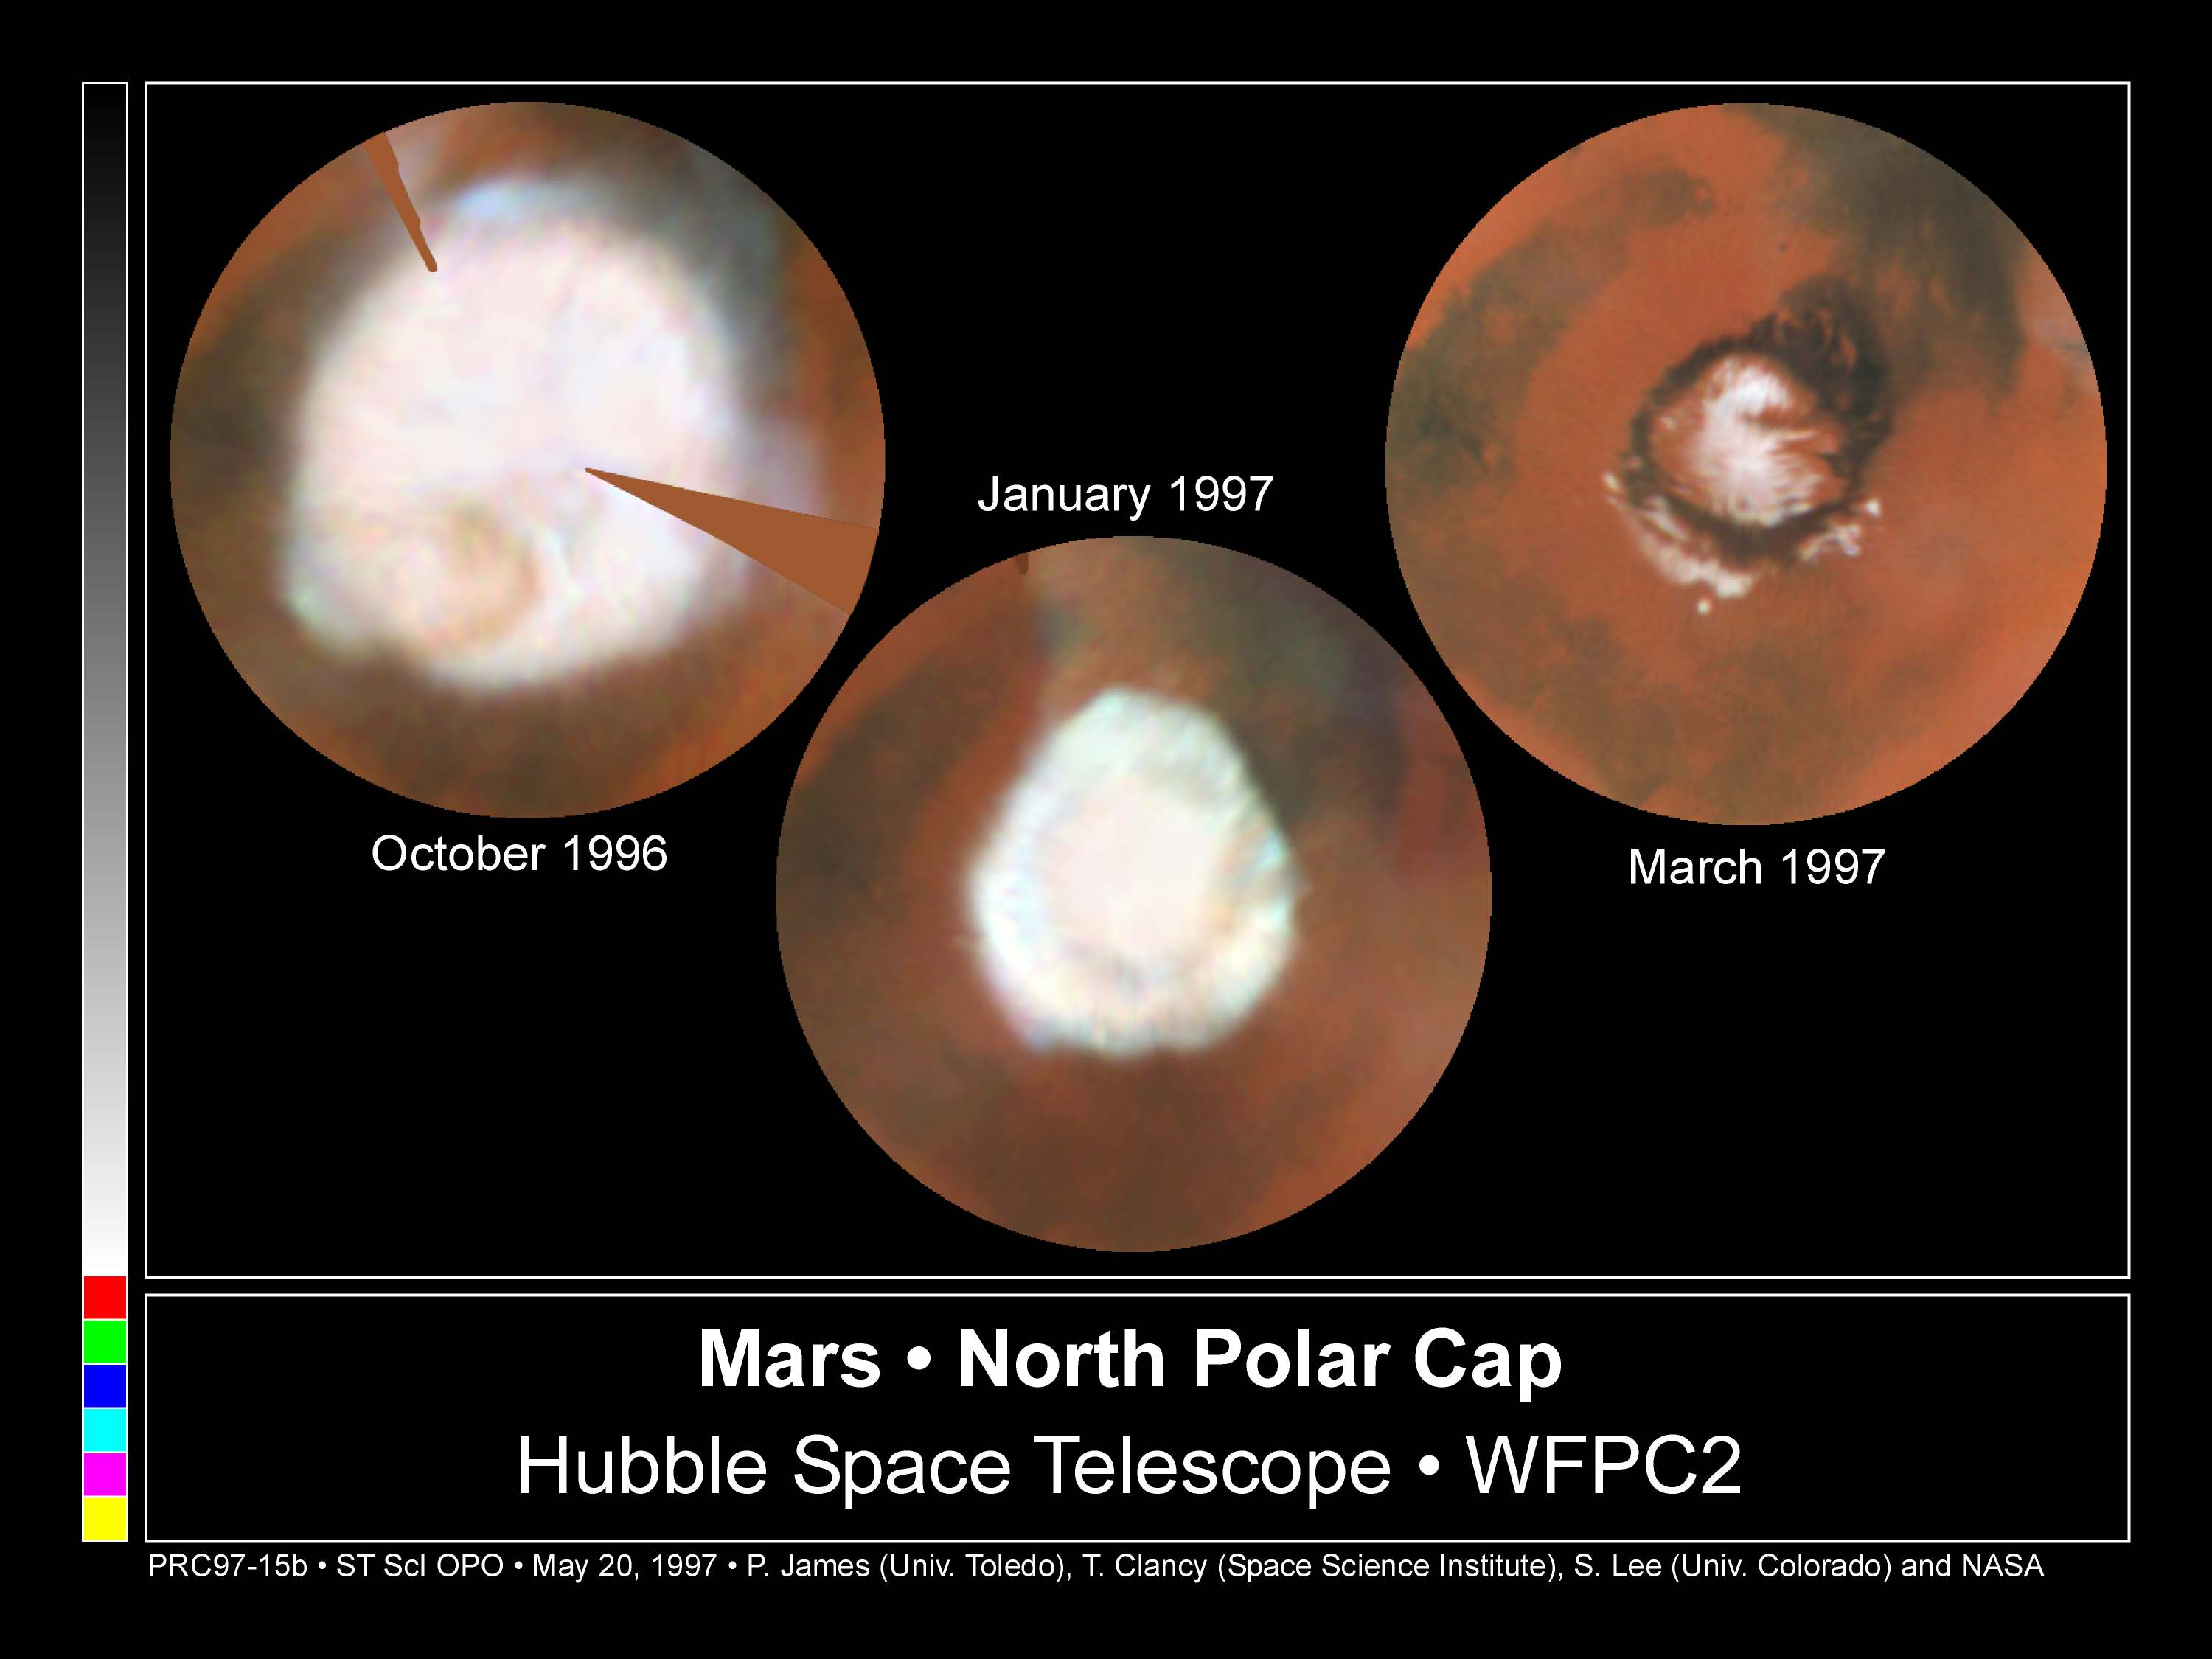

Seasonal Changes In Mars' North Polar Ice Cap

These images, which seem to have been taken while Hubble Space Telescope (HST) was looking directly down on the Martian North Pole, were actually created by assembling mosaics of three sets of images taken by HST in October, 1996 and in January and March, 1997 and projecting them to appear as they would if seen from above the pole. This first mosaic is a view which could not actually be seen in nature because at this season a portion of the pole would have actually been in shadow; the last view, taken near the summer solstice, would correspond to the Midnight Sun on Earth with the pole fully illuminated all day. The resulting polar maps begin at 50 degrees N latitude and are oriented with 0 degrees longitude at the 12 o'clock position. This series of pictures captures the seasonal retreat of Mars' north polar cap.

Credit: Phil James (Univ. Toledo), Todd Clancy (Space Science Inst., Boulder, CO), Steve Lee (Univ. Colorado), and NASA/ESA